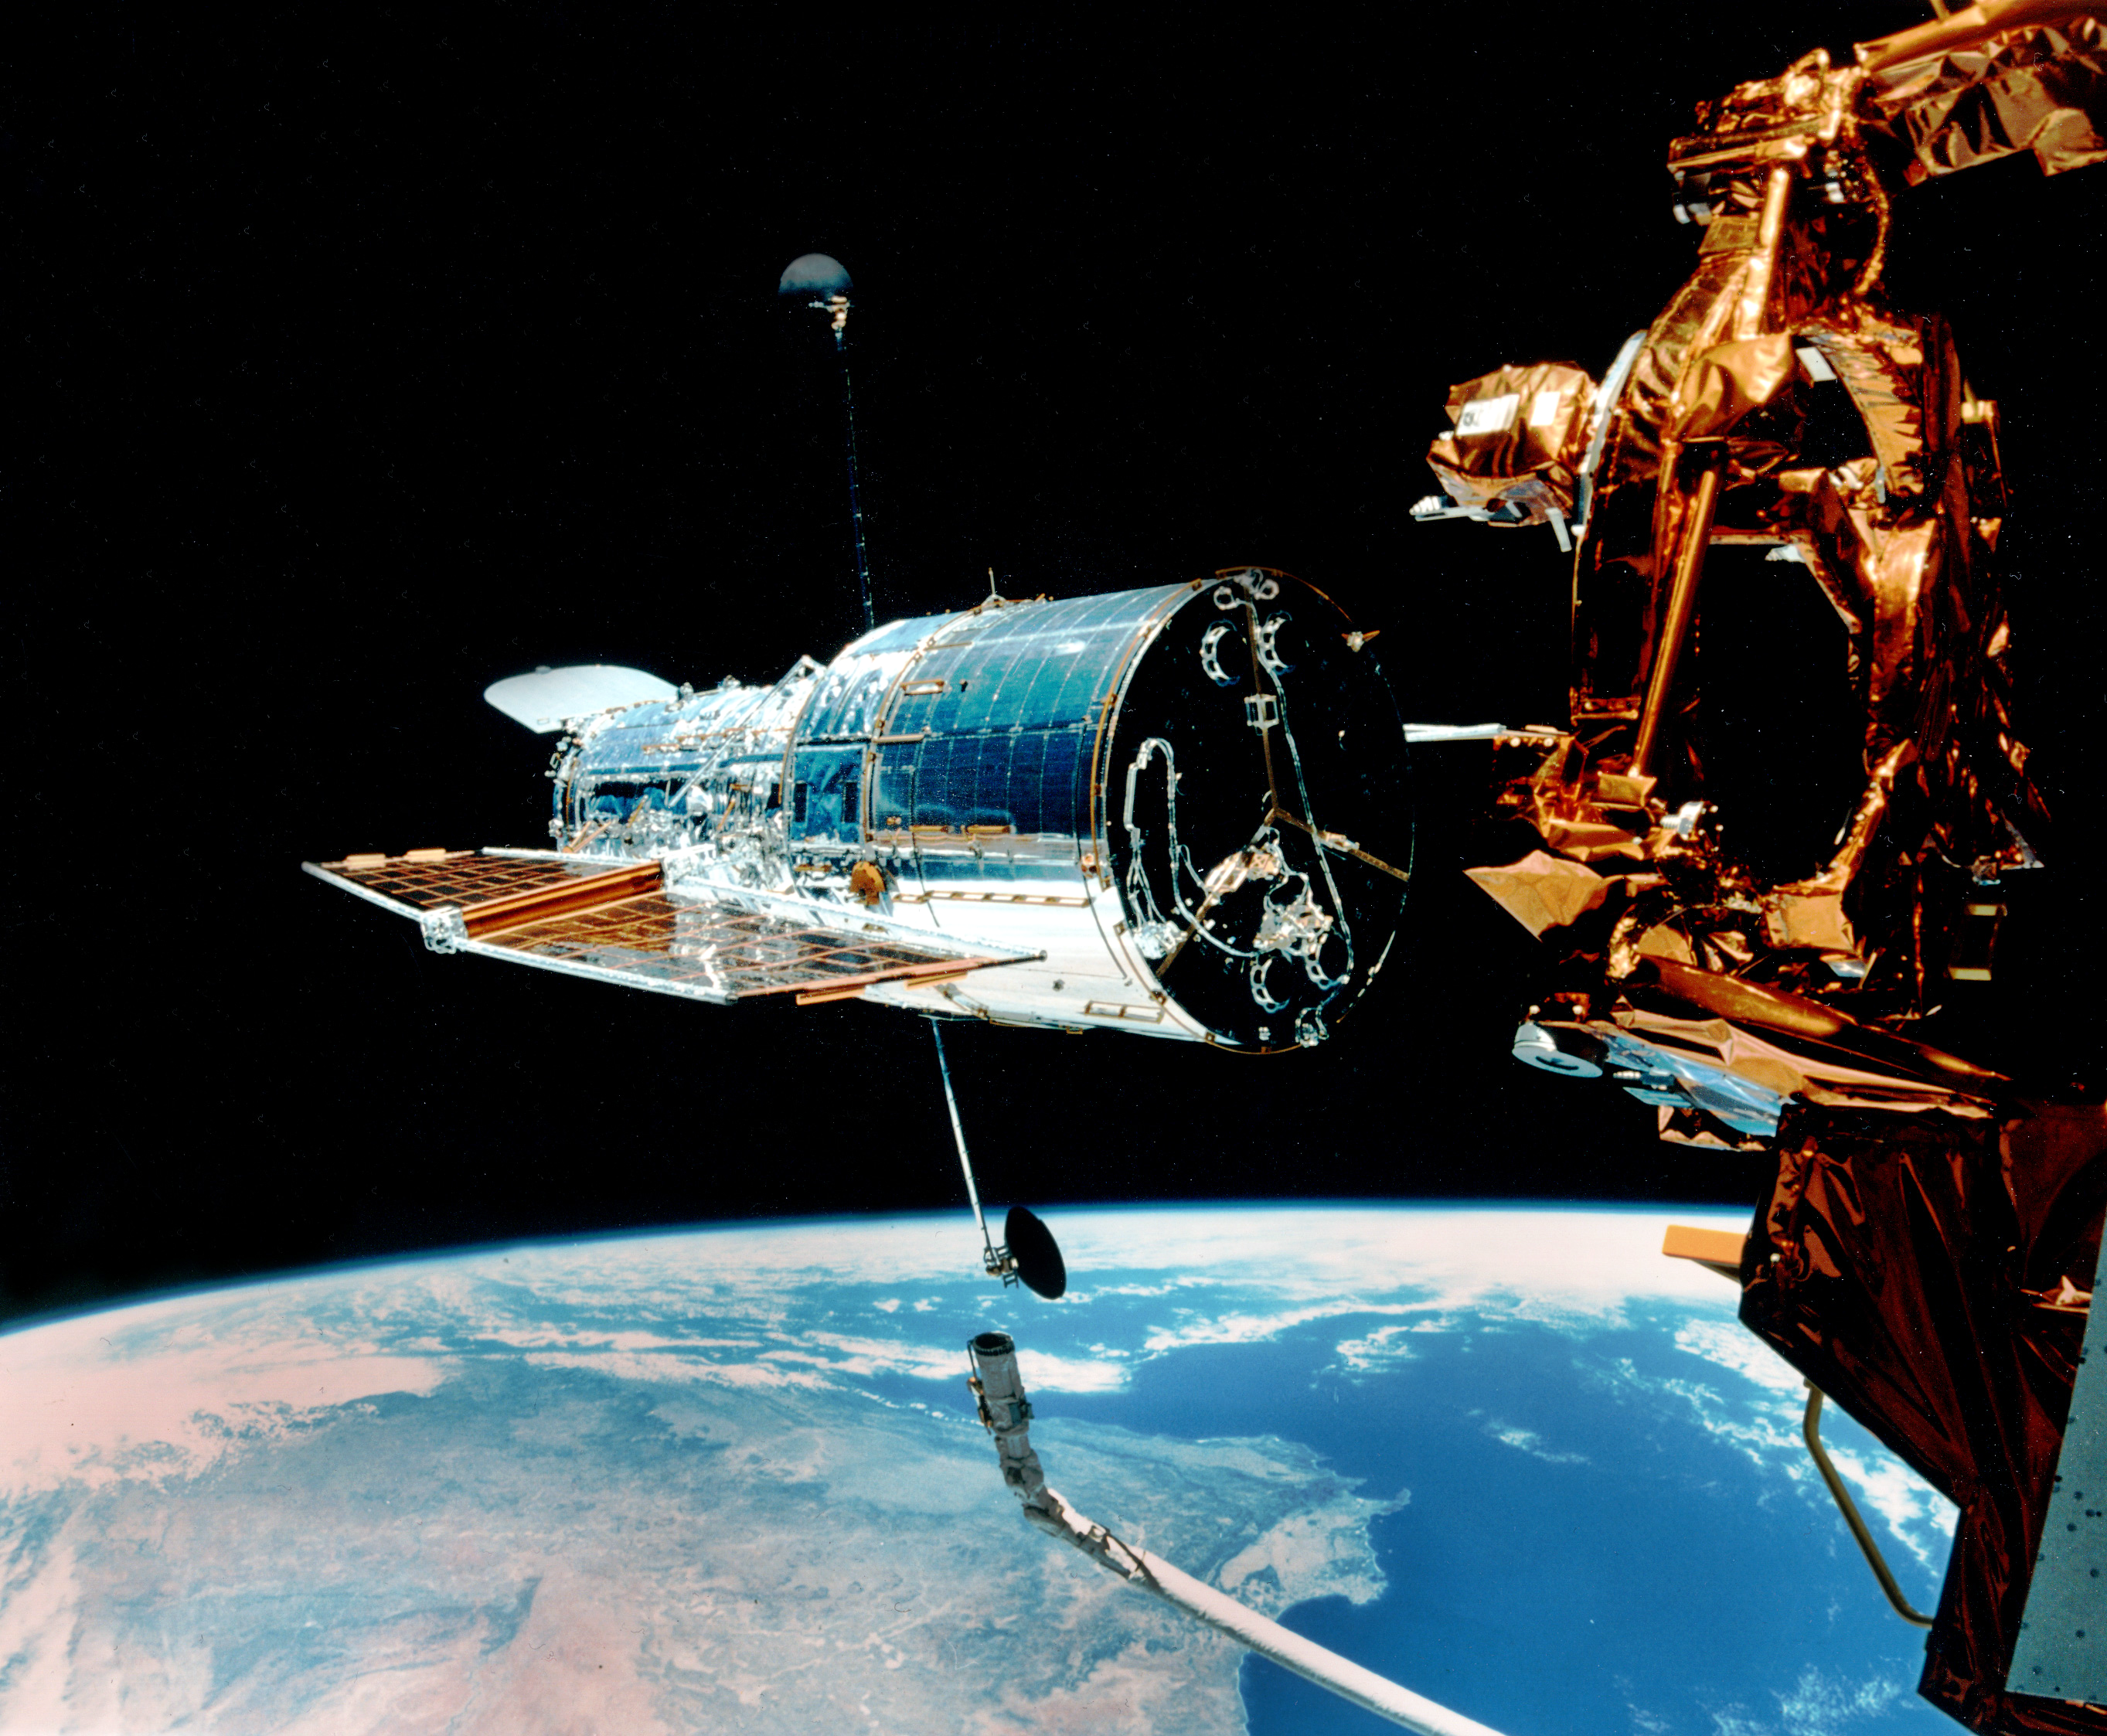

Hubble Left Alone in Space

This image is taken just after the Hubble Space Telescope separates from the Space Shuttle Discovery.

Credit: NASA/ESA